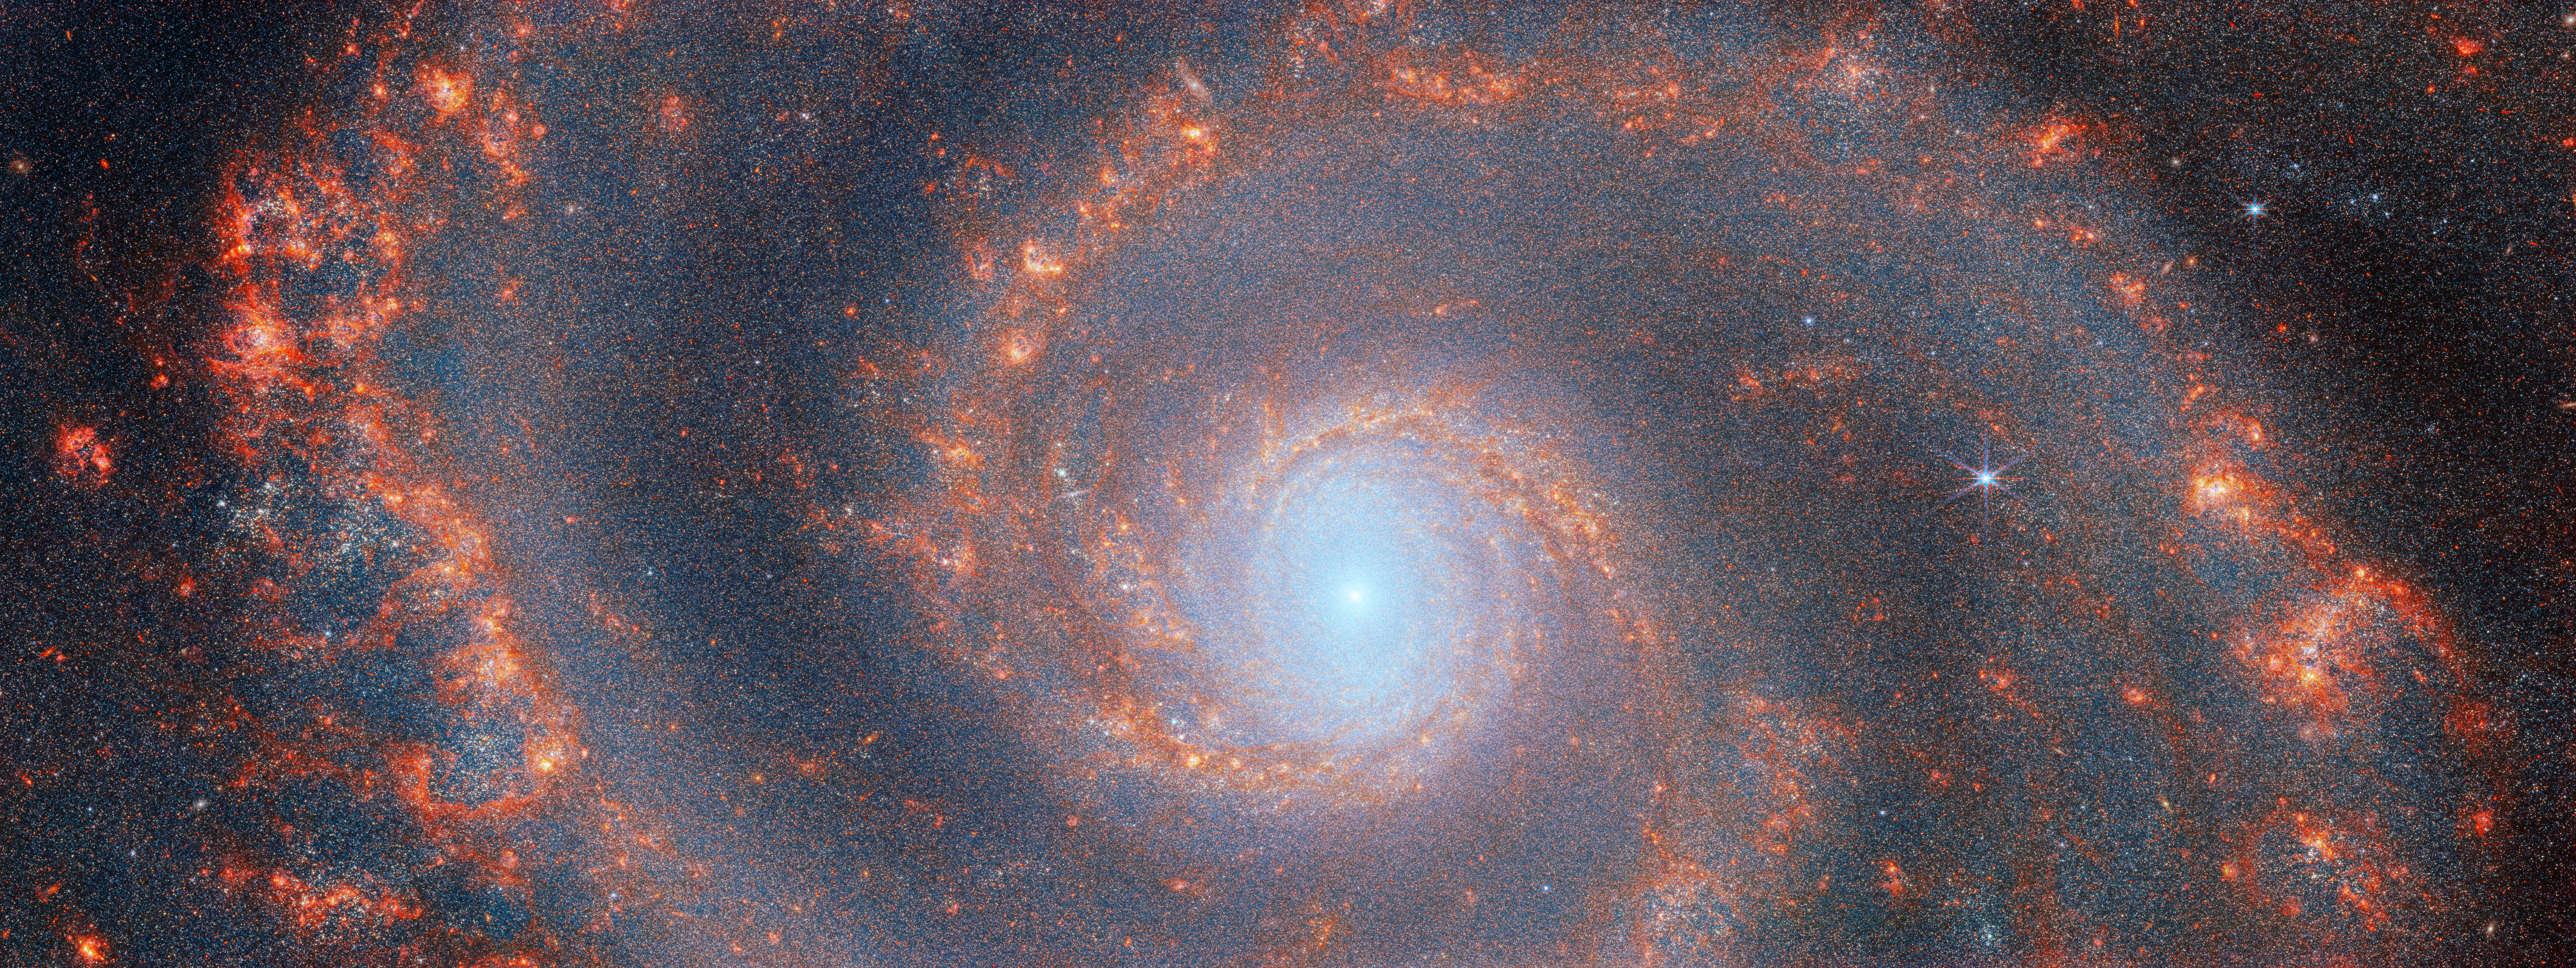

M51 (NIRCam image)

The graceful winding arms of the grand-design spiral galaxy M51 stretch across this image from the NASA/ESA/CSA James Webb Space Telescope. Unlike the menagerie of weird and wonderful spiral galaxies with ragged or disrupted spiral arms, grand-design spiral galaxies boast prominent, well-developed spiral arms like the ones showcased in this image. This galactic portrait was captured by Webb’s Near-InfraRed Camera (NIRCam).

In this image, the dark red features trace the filamentary warm dust, while colours of red, orange, and yellow show the sign spots of ionised gas by the recently formed star clusters. Stellar feedback has a dramatic effect on the medium of the galaxy and create complex network of bright knots as well as cavernous black bubbles.

M51 — also known as NGC 5194 — lies about 27 million light-years away from Earth in the constellation Canes Venatici, and is trapped in a tumultuous relationship with its near neighbour, the dwarf galaxy NGC 5195. The interaction between these two galaxies has made these galactic neighbours one of the better-studied galaxy pairs in the night sky. The gravitational influence of M51’s smaller companion is thought to be partially responsible for the stately nature of the galaxy’s prominent and distinct spiral arms. If you would like to learn more about this squabbling pair of galactic neighbours, you can explore earlier observations of M51 by the NASA/ESA Hubble Space Telescope here.

This Webb observation of M51 is one of a series of observations collectively titled Feedback in Emerging extrAgalactic Star clusTers, or FEAST. The FEAST observations were designed to shed light on the interplay between stellar feedback and star formation in environments outside of our own galaxy, the Milky Way. Stellar feedback is the term used to describe the outpouring of energy from stars into the environments which form them, and is a crucial process in determining the rates at which stars form. Understanding stellar feedback is vital to building accurate universal models of star formation.

The aim of the FEAST observations is to discover and study stellar nurseries in galaxies beyond our own Milky Way. Before Webb became operative, other observatories such as the Atacama Large Millimetre Array in the Chilean desert and Hubble have given us a glimpse of star formation either at the onset (tracing the dense gas and dust clouds where stars will form) or after the stars have destroyed with their energy their natal gas and dust clouds. Webb is opening a new window into the early stages of star formation and stellar light, as well as the energy reprocessing of gas and dust. Scientists are seeing star clusters emerging from their natal cloud in galaxies beyond our local group for the first time. They will also be able to measure how long it takes for these stars to pollute with newly formed metals and to clean out the gas (these time scales are different from galaxy to galaxy). By studying these processes, we will better understand how the star formation cycle and metal enrichment are regulated within galaxies as well as what are the time scales for planets and brown dwarfs to form. Once dust and gas is removed from the newly formed stars, there is no material left to form planets.

Credit: ESA/Webb, NASA & CSA, A. Adamo (Stockholm University) and the FEAST JWST team